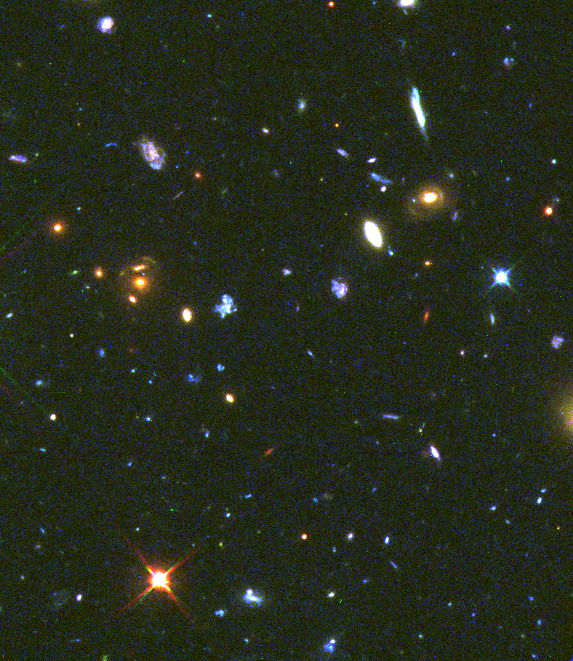

Faint Blue Galaxies

One of the deepest images of the sky taken to date with the Hubble Space Telescope reveals a population of faint blue galaxies which turn out to be the most common class of objects in the universe.

Credit: Rogier Windhorst and Simon Driver (Arizona State University), Bill Keel (University of Alabama), and NASA/ESA